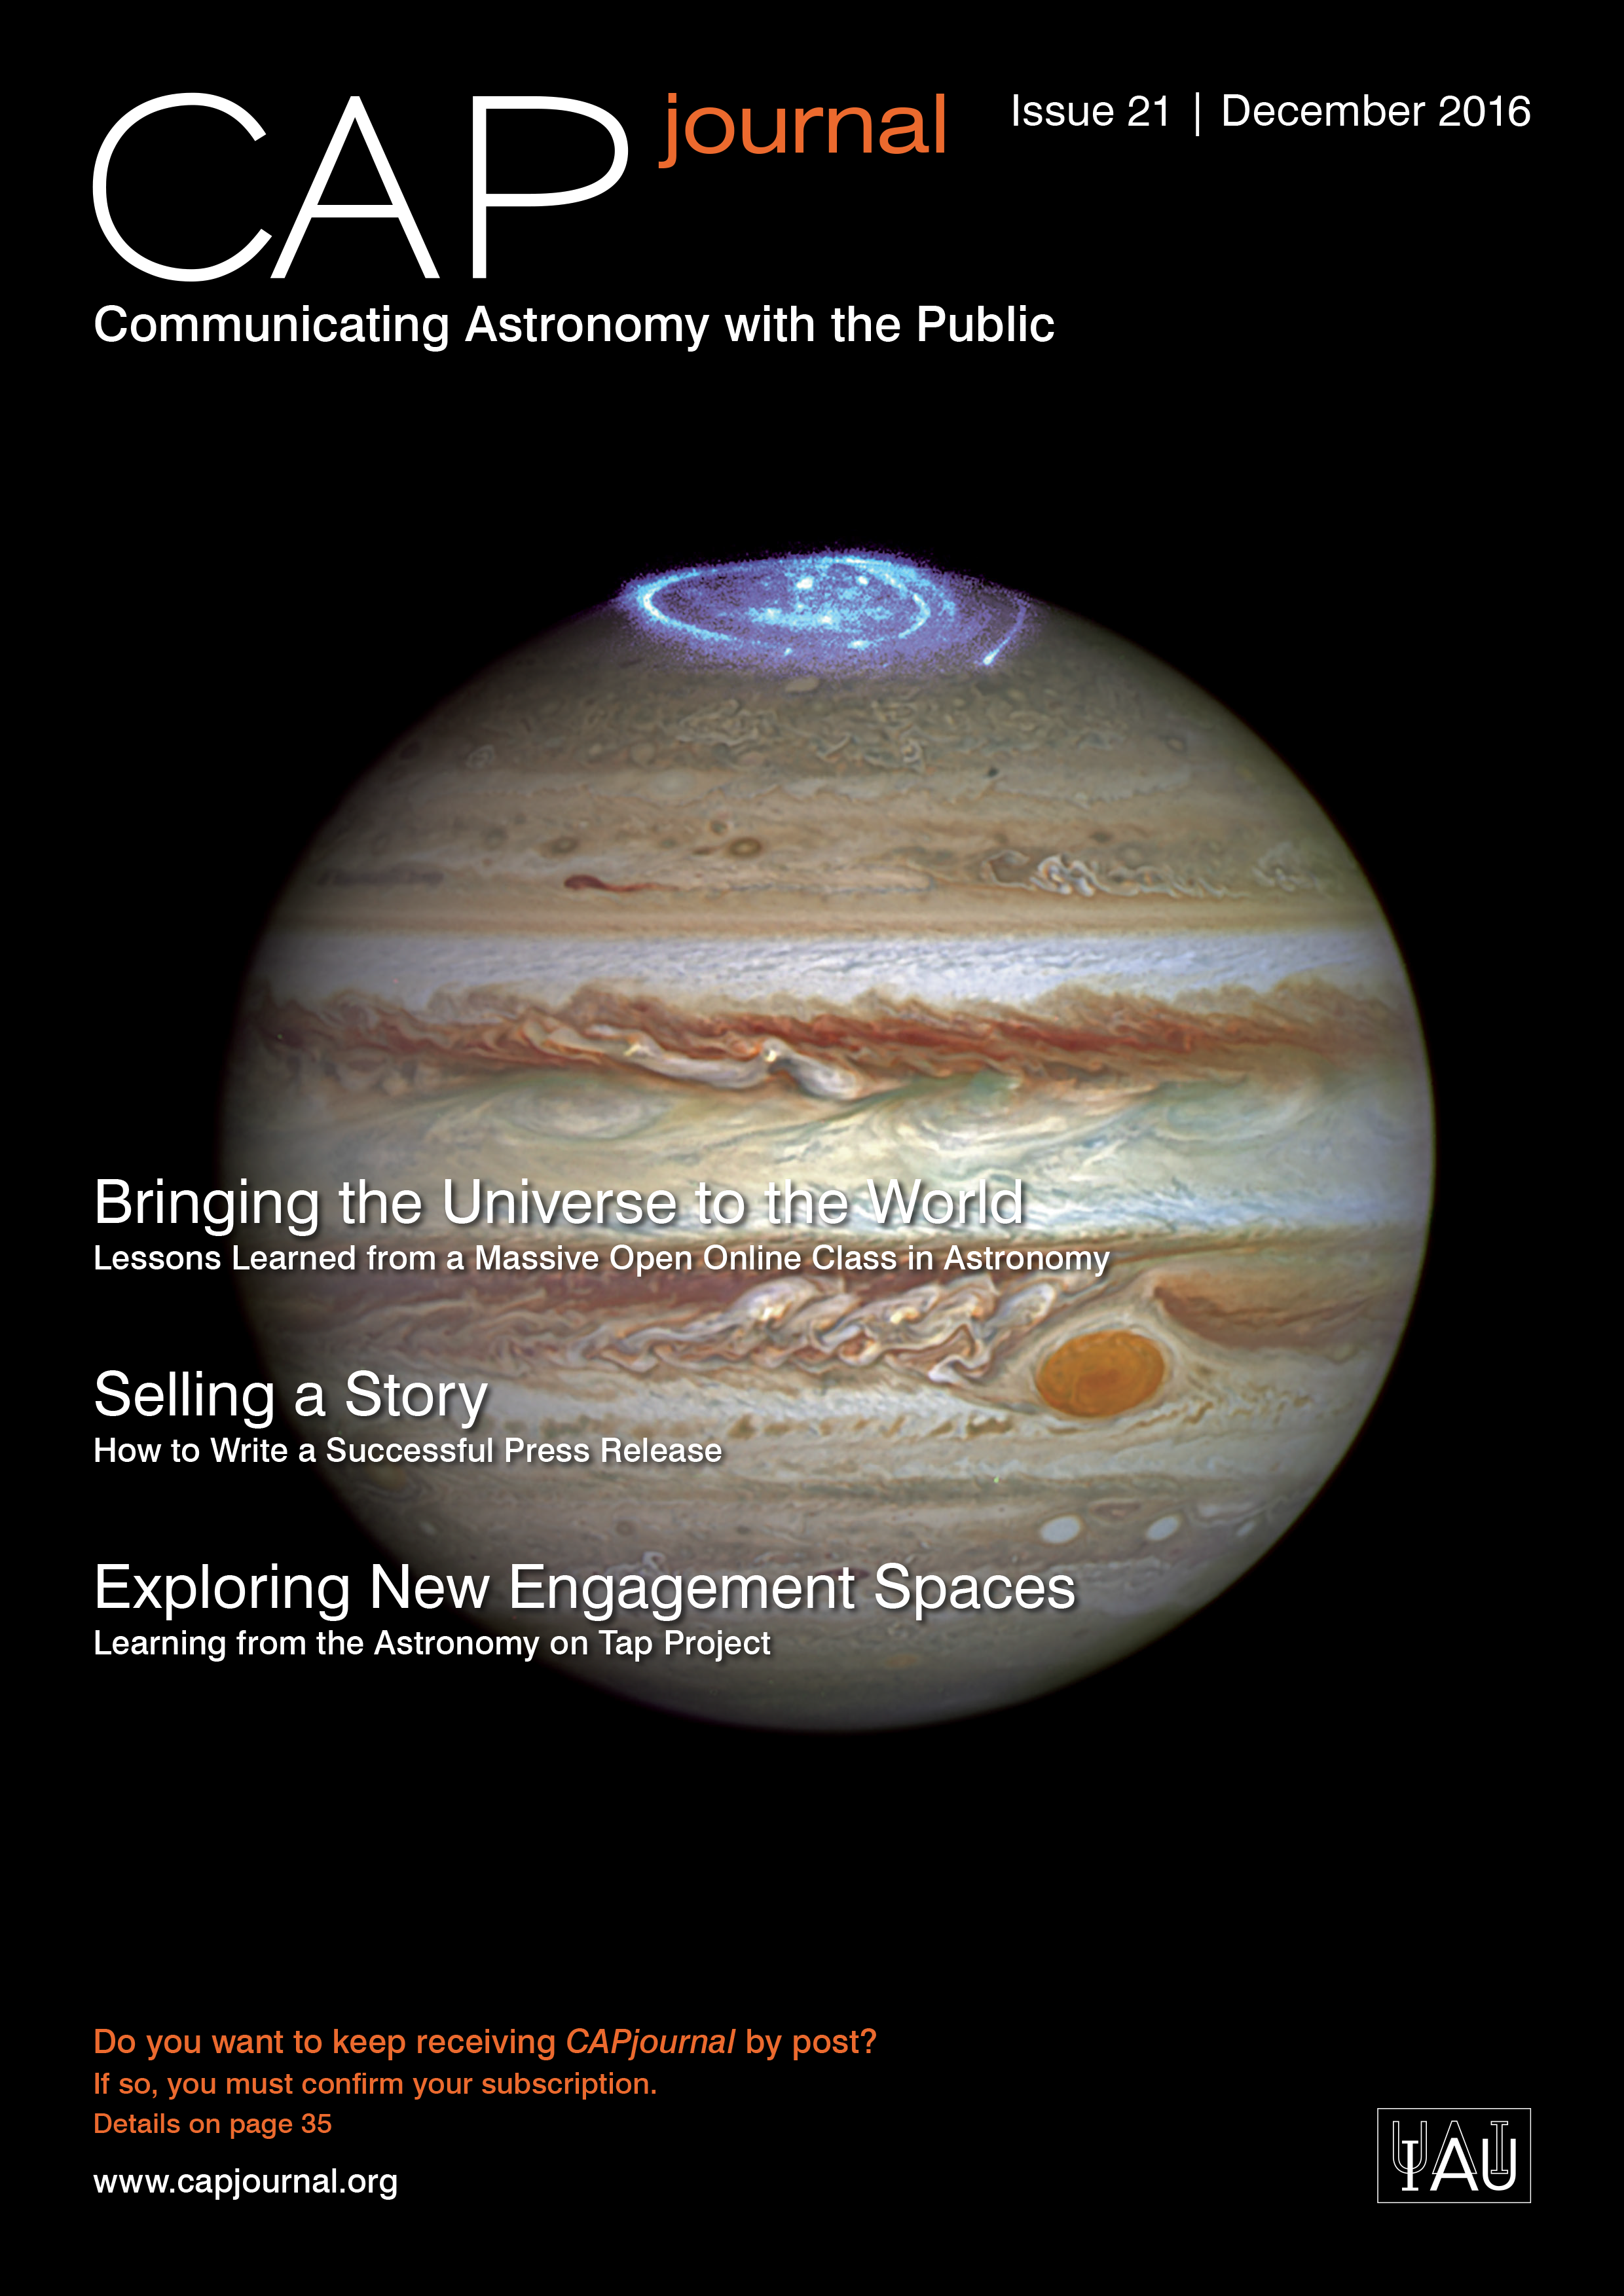

Cover picture of CAP Journal issue 21

Cover picture of CAP Journal issue 21.

Credit: ESO